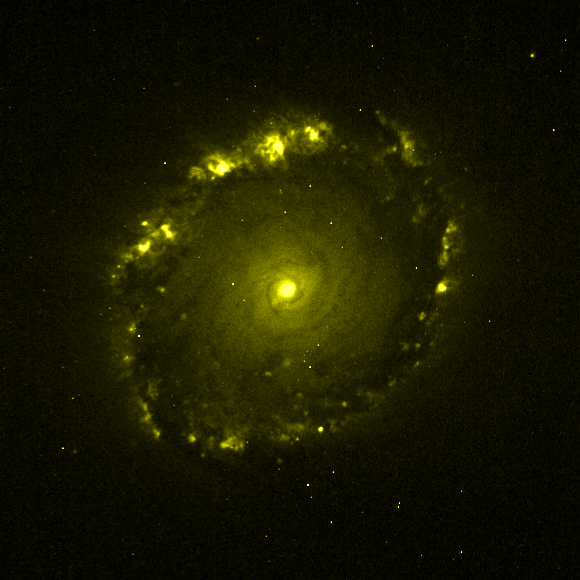

Individual colour images - 4 (WFPC2, 659 nm)

This is the fourth in a sequence of seven images which demonstrate the Hubble telescope's wavelength range, starting in the far ultraviolet and stretching all the way to the infrared.

This image was taken by the Wide Field and Planetary Camera 2(WFPC2). The yellow colour (659 nm) represents visible light from (redshifted) ionised hydrogen (H-alpha). The image was taken on 5 March, 1999, and has an exposure time of 5200 s.

This image is issued jointly by NASA and ESA.

Credit: NASA, ESA, Dan Maoz (Tel-Aviv University, Israel, and Columbia University, USA)